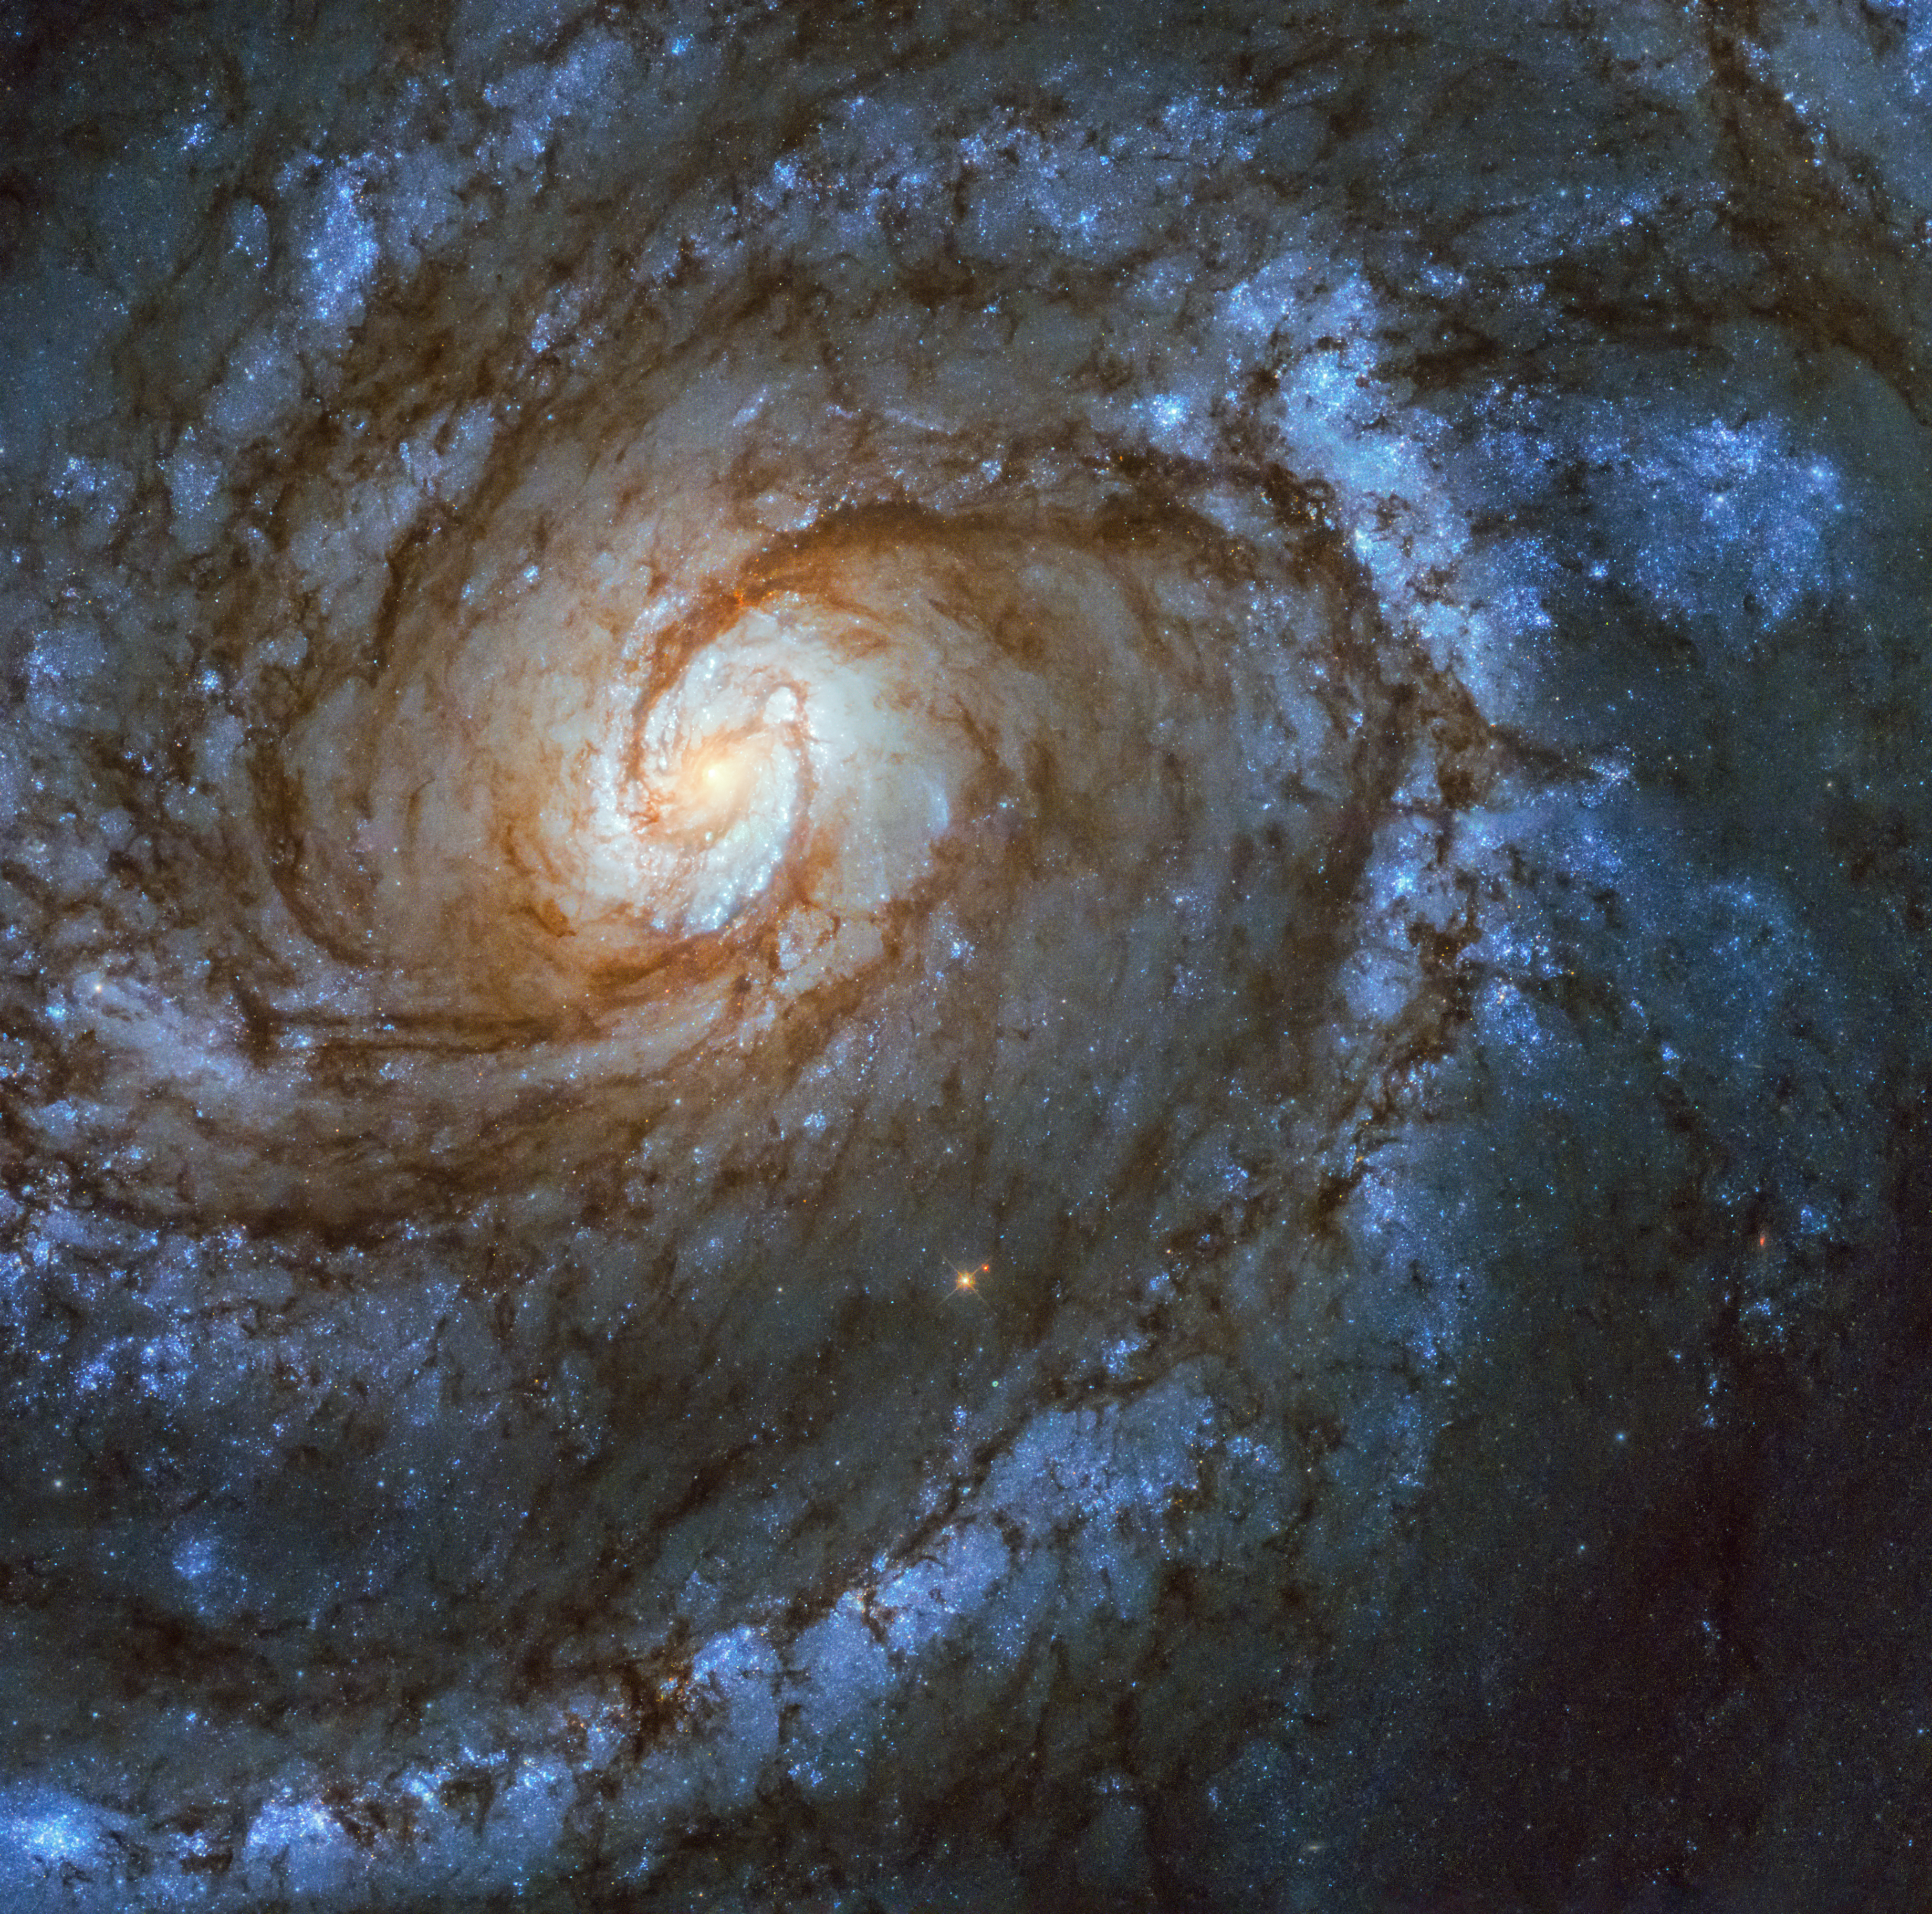

25 years of stunning definition

This stunning spiral galaxy is Messier 100 in the constellation Coma Berenices, captured here by the NASA/ESA Hubble Space Telescope — not for the first time. Among Hubble’s most striking images of Messier 100 are a pair taken just over a month apart, before and after Servicing Mission 1, which took place 25 years ago in December 1993.

After Hubble was launched, the astronomers and engineers operating the telescope found that the images it returned were fuzzy, as if it were out of focus. In fact, that was exactly what was happening. Hubble’s primary mirror functions like a satellite dish; its curved surface reflects all the light falling on it to a single focal point. However, the mirror suffered from a defect known as a spherical aberration, meaning that the light striking the edges of the mirror was not travelling to the same point as the light from the centre. The result was blurry, unfocused images.

To correct this fault, a team of seven astronauts undertook the first Servicing Mission in December 1993. They installed a device named COSTAR (Corrective Optics Space Telescope Axial Replacement) on Hubble, which took account of this flaw of the mirror and allowed the scientific instruments to correct the images they received. The difference between the photos taken of Messier 100 before and after shows the remarkable effect this had, and the dramatic increase in image quality.

COSTAR was in place on Hubble until Servicing Mission 4, by which time all the original instruments had been replaced. All subsequent instrumentation had corrective optics built in.

This new image of Messier 100 taken with Hubble’s Wide Field Camera 3 (WFC3), demonstrates how much better the latest generation of instruments is compared to the ones installed in Hubble after its launch and after Servicing Mission 1.

Credit: NASA, ESA